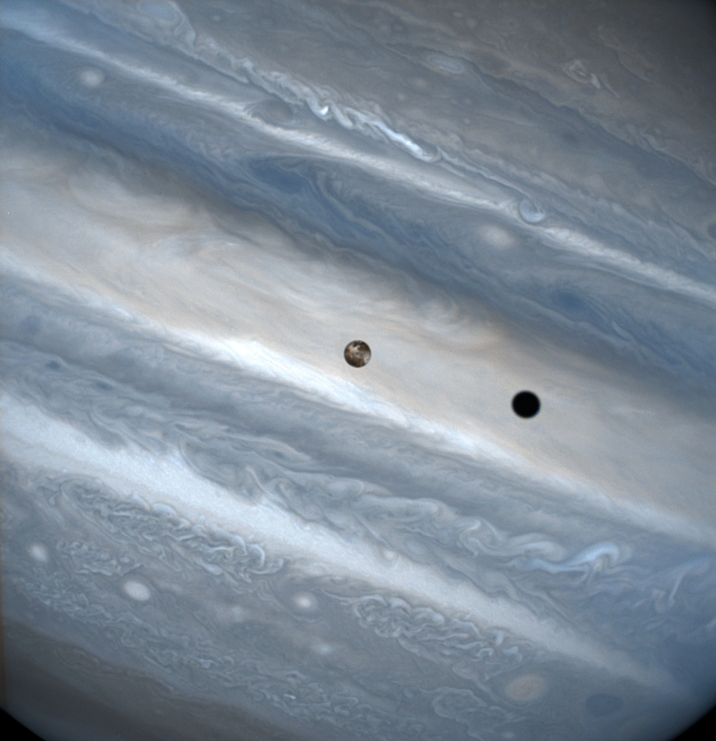

Io Transit of Jupiter

The three snapshots of the volcanic moon rounding Jupiter were taken over a 1.8-hour time span. Io is roughly the size of Earth's moon but 2, 000 times farther away. In two of the images, Io appears to be skimming Jupiter's cloud tops, but it's actually 310, 000 miles (500, 000 kilometers) away. Io zips around Jupiter in 1.8 days, whereas the moon circles Earth every 28 days.

The conspicuous black spot on Jupiter is Io's shadow and is about the size of the moon itself (2, 262 miles or 3, 640 kilometers across). This shadow sails across the face of Jupiter at 38, 000 mph (17 kilometers per second). The smallest details visible on Io and Jupiter measure 93 miles (150 kilometers) across, or about the size of Connecticut.

Credit: J. Spencer (Lowell Observatory) and NASA/ESA